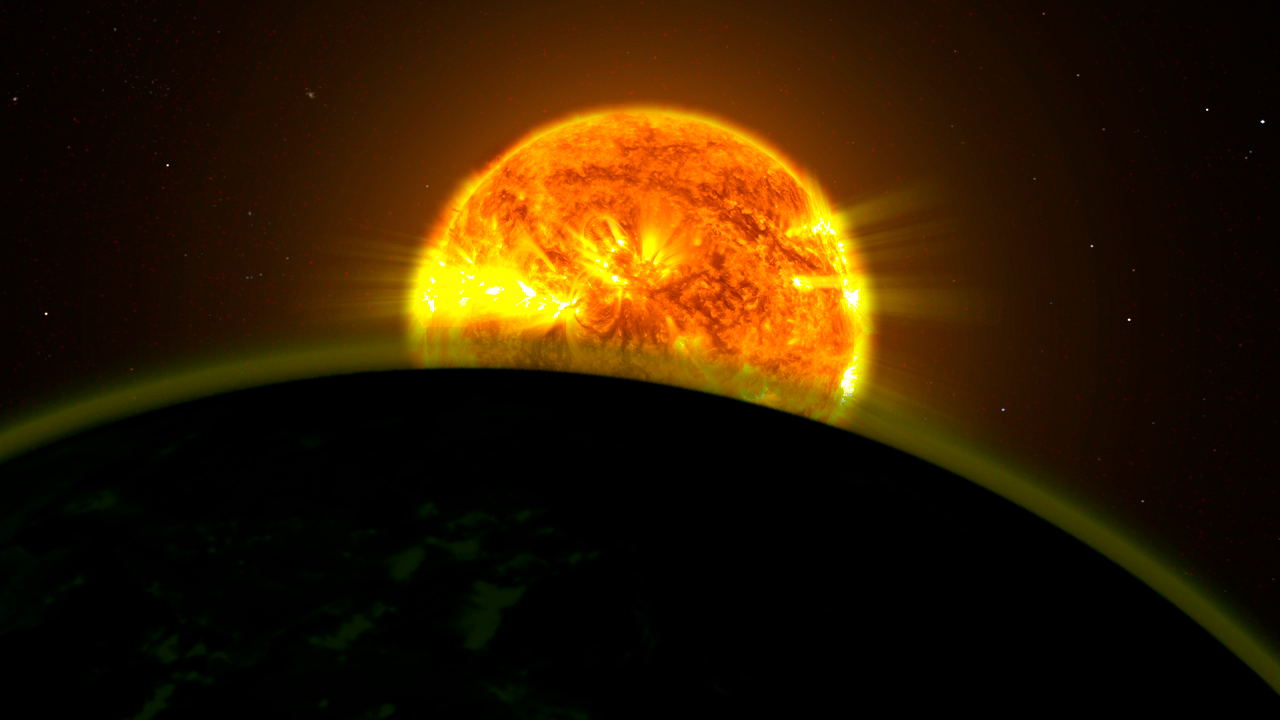

Hubble traces faint signatures of water in exoplanet atmospheres (artist's illustration)

Two teams of astronomers using the NASA/ESA Hubble Space Telescope have found faint signatures of water in the atmospheres of five distant exoplanets orbiting three different stars: WASP-17b, HD209458b, WASP-12b, WASP-19b, and XO-1b. All five planets appear to be hazy.

The planets are not the size of Earth, but rather massive worlds known as hot Jupiters because they orbit so close to their stars. Hubble's instruments can deduce the types of gases in the atmospheres of these monsters by determining which colours of a star's light are transmitted and which are partially absorbed as the planet passes in front of its star.

Credit: NASA Goddard Space Flight Center Science credit: NASA, ESA, A. Mandell (Goddard Space Flight Center), and D. Deming (University of Maryland, College Park)